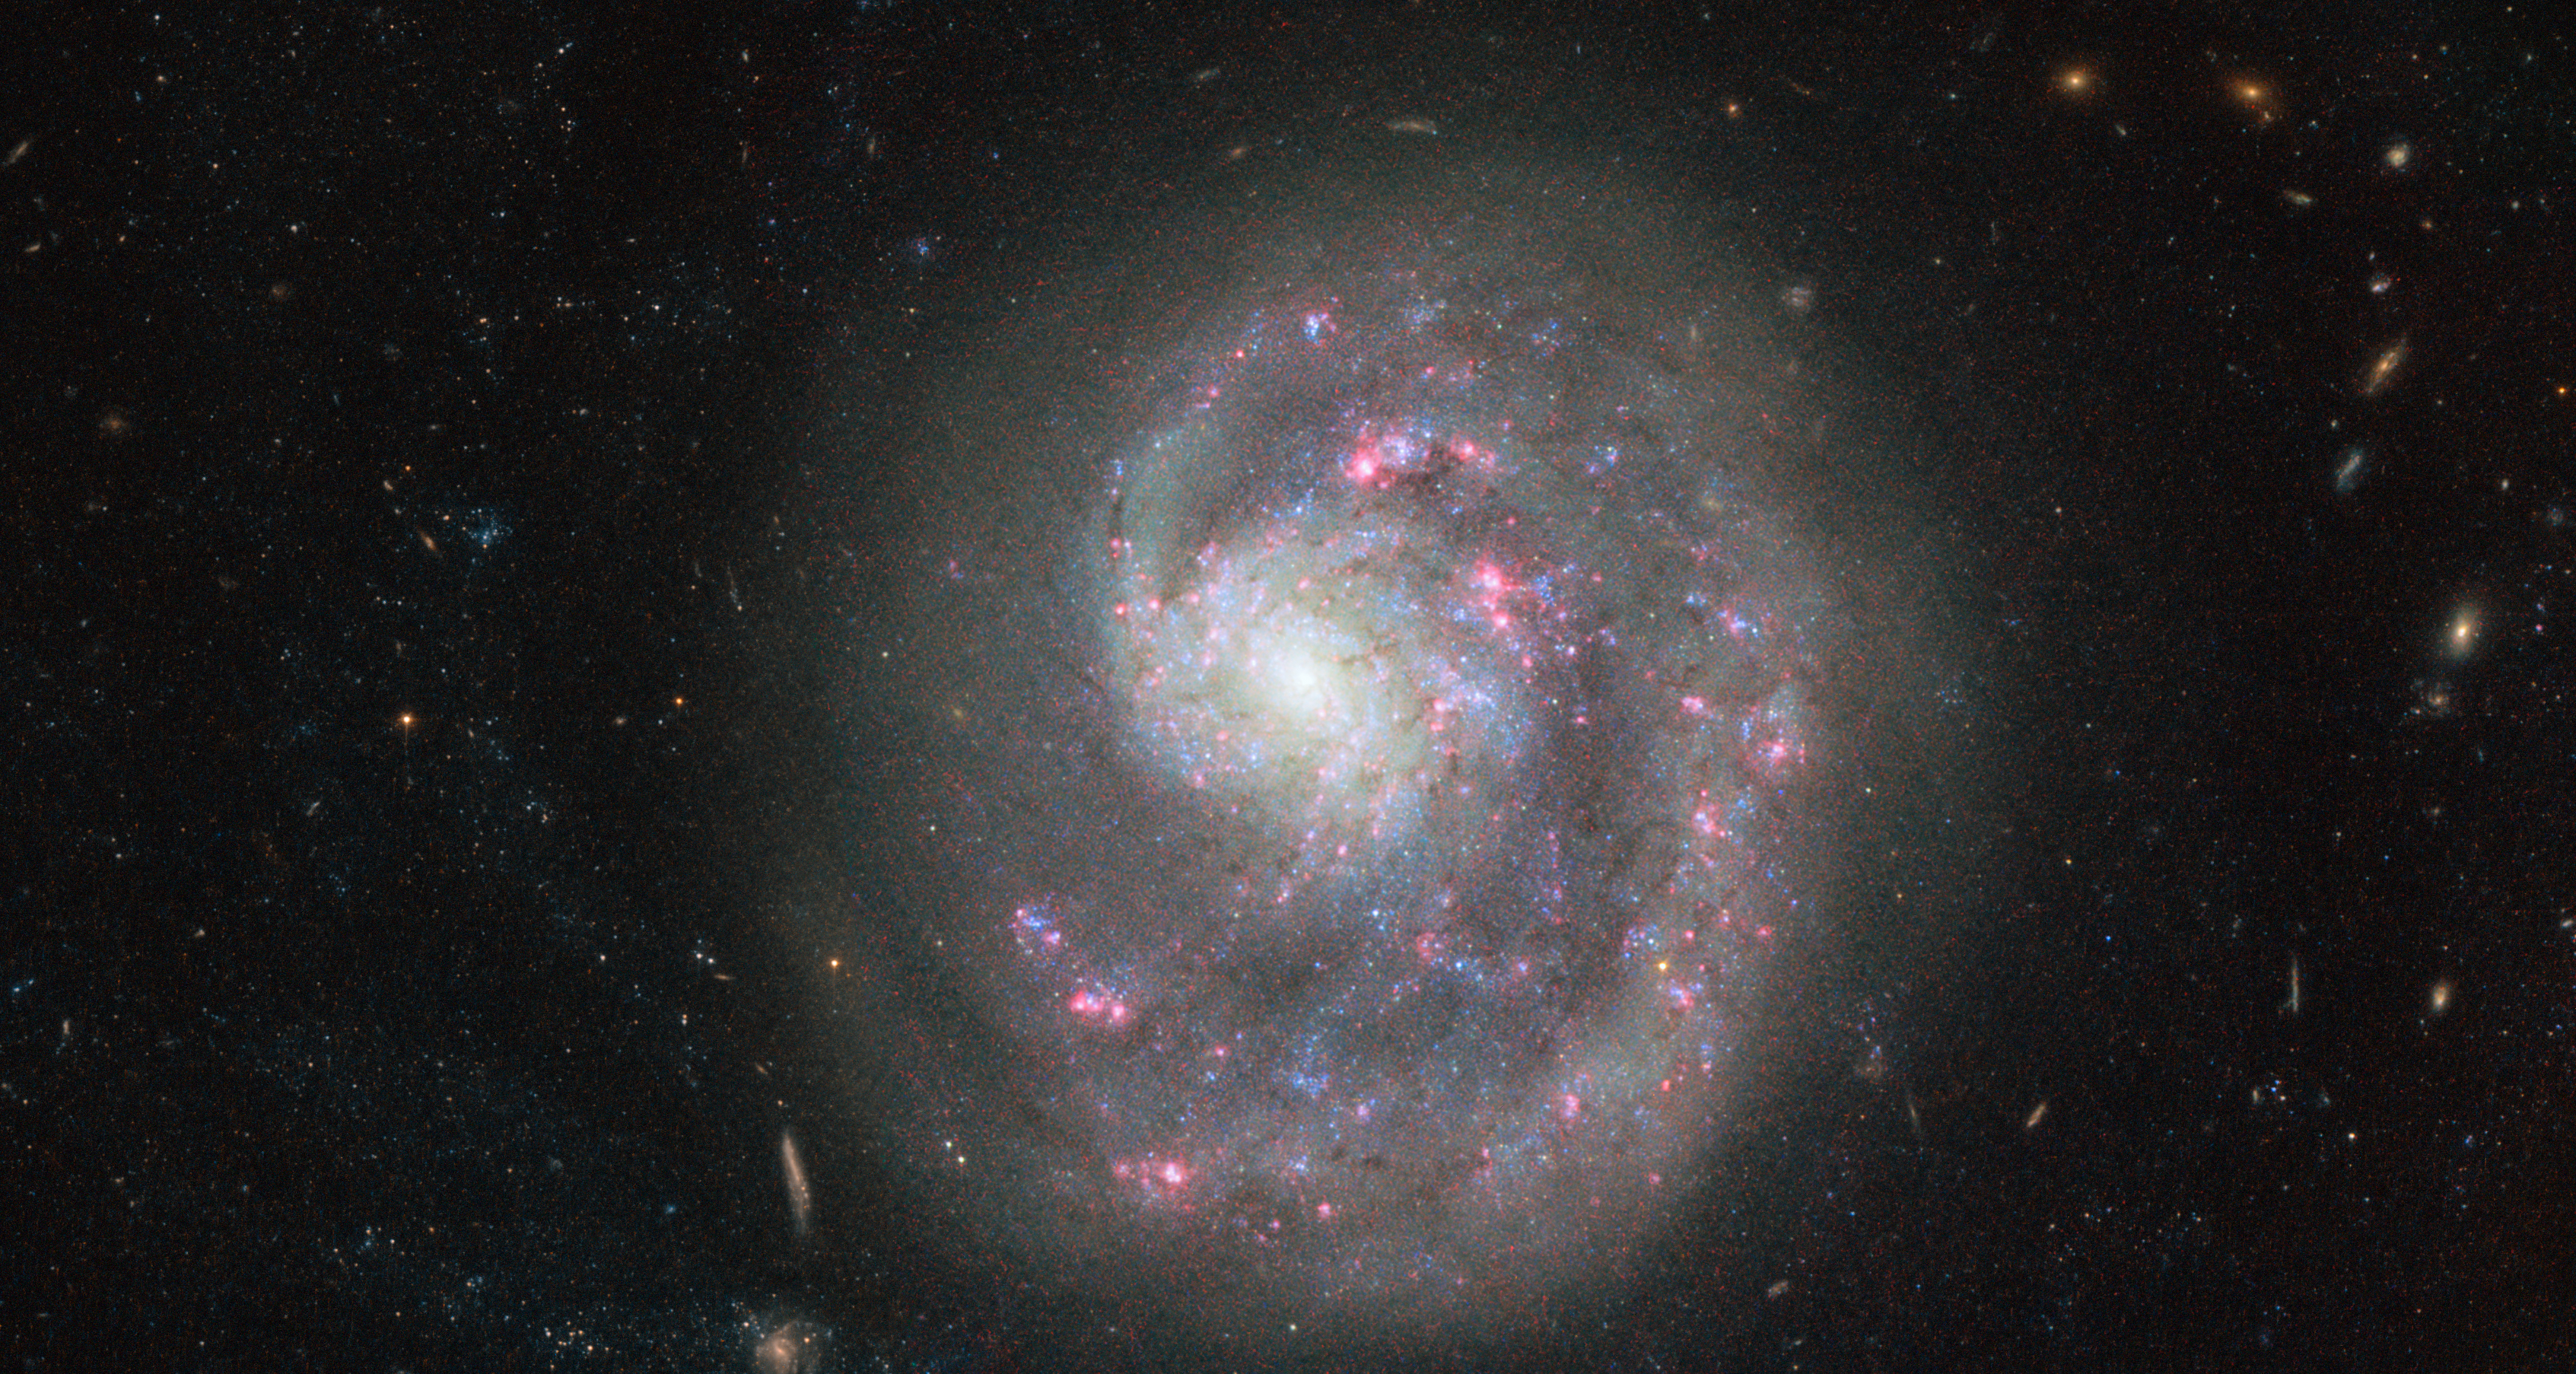

Cosmic search for a missing limb

This new Picture of the Week, taken by the NASA/ESA Hubble Space Telescope, shows the dwarf galaxy NGC 4625, located about 30 million light-years away in the constellation of Canes Venatici (The Hunting Dogs). The image, acquired with the Advanced Camera for Surveys (ACS), reveals the single spiral arm of the galaxy, which gives it an asymmetric appearance. But why is there only one spiral arm, when spiral galaxies normally have at least two?

Astronomers looked at NGC 4625 in different wavelengths in the hope of solving this cosmic mystery. Observations in the ultraviolet provided the first hint: in ultraviolet light the disc of the galaxy appears four times larger than on the image depicted here. An indication that there are a large number of very young and hot — hence mainly visible in the ultraviolet — stars forming in the outer regions of the galaxy. These young stars are only around one billion years old, about 10 times younger than the stars seen in the optical centre. At first astronomers assumed that this high star formation rate was being triggered by the interaction with another, nearby dwarf galaxy called NGC 4618.

They speculated that NGC 4618 may be the culprit “harassing” NGC 4625, causing it to lose all but one spiral arm. In 2004 astronomers found proof for this claim: The gas in the outermost regions of the dwarf galaxy NGC 4618 has been strongly affected by NGC 4625.

Credit: ESA/Hubble & NASA